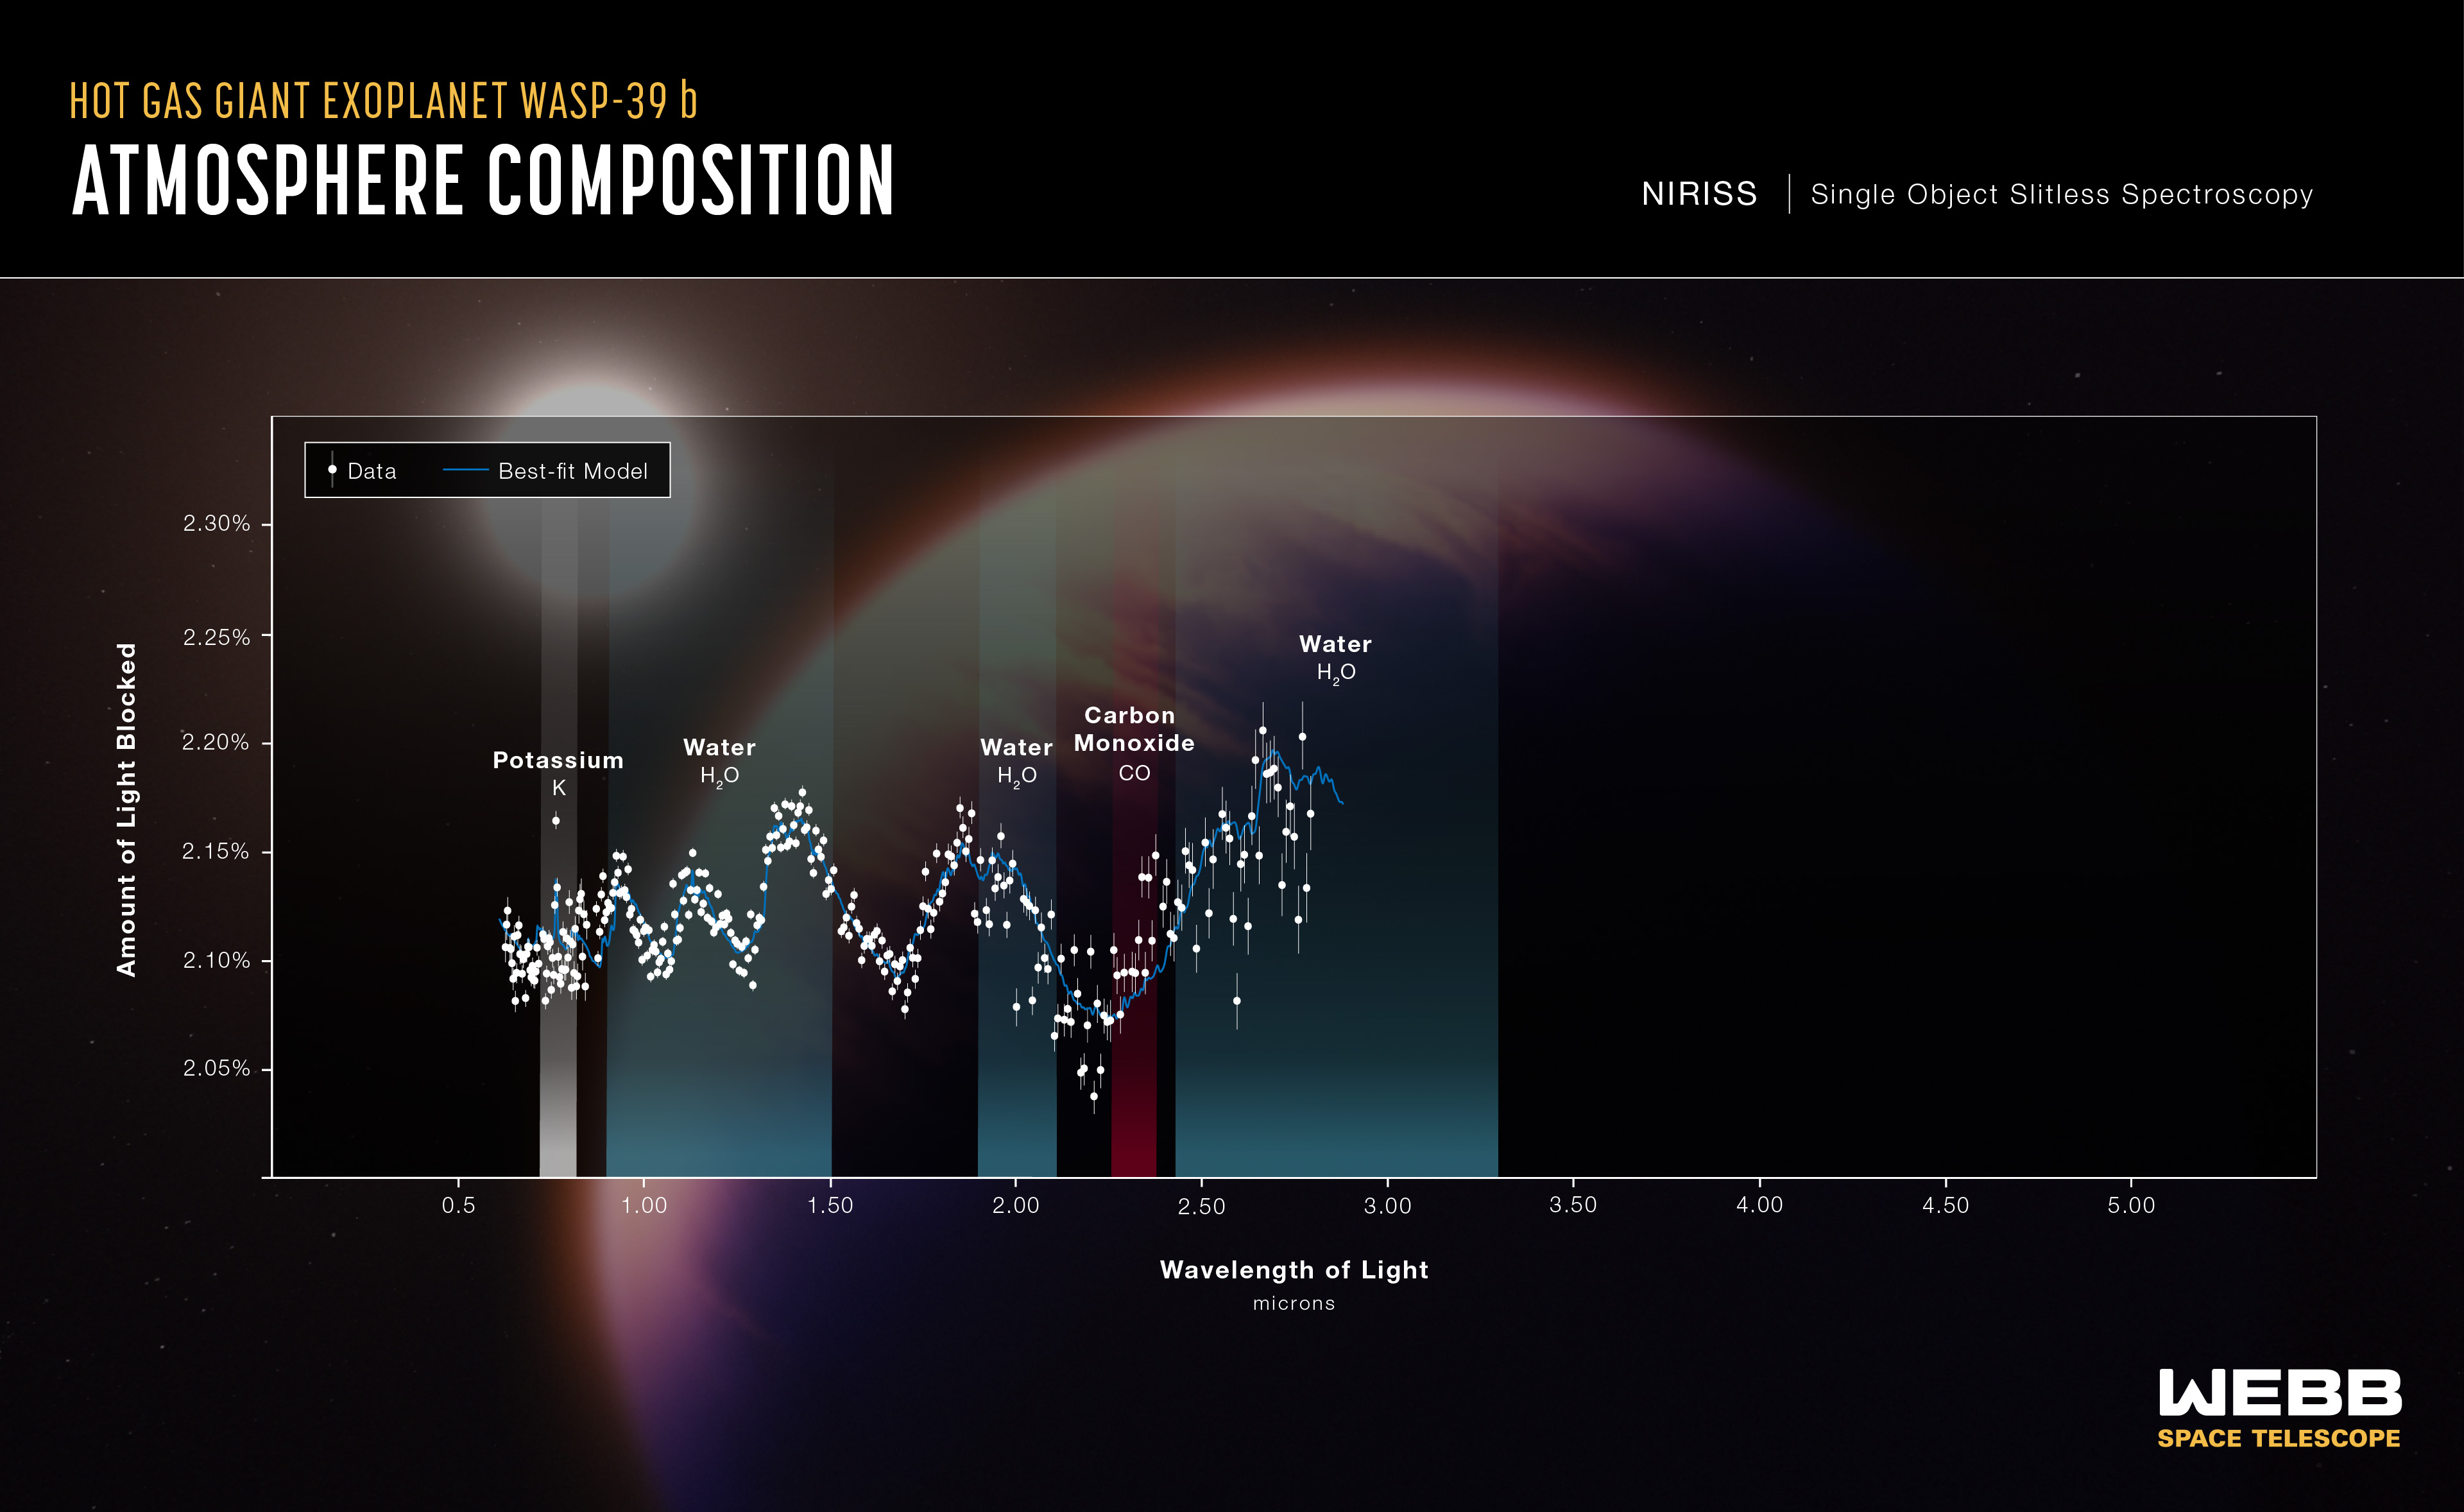

WASP-39 b Atmospheric Composition (NIRISS)

The atmospheric composition of the hot gas giant exoplanet WASP-39 b has been revealed by the NASA/ESA/CSA James Webb Space Telescope.

A transmission spectrum is made by comparing starlight filtered through a planet’s atmosphere as it moves in front of the star, to the unfiltered starlight detected when the planet is beside the star. Each of the data points (white circles) on these graphs represents the amount of a specific wavelength of light that is blocked by the planet and absorbed by its atmosphere. Wavelengths that are preferentially absorbed by the atmosphere appear as peaks in the transmission spectrum.

The blue line is a best-fit model that takes into account the data, the known properties of WASP-39 b and its star (e.g., size, mass, temperature), and assumed characteristics of the atmosphere. Researchers can vary the parameters in the model – changing unknown characteristics like cloud height in the atmosphere and abundances of various gases – to get a better fit and further understand what the atmosphere is really like.

This graph displays data from Webb's NIRISS instrument, showing fingerprints of potassium (K), water (H2O), and carbon monoxide (CO).

Credit: NASA, ESA, CSA, J. Olmsted (STScI)